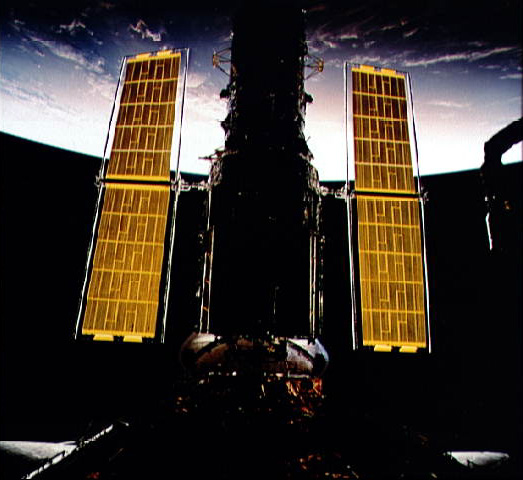

Hubble's New Solar Arrays

The new set of solar array panels deployed on the Hubble Space Telescope (HST) is backdropped against the blackness of space and a widely cloud-covered area on Earth.

Credit: NASA/ESA